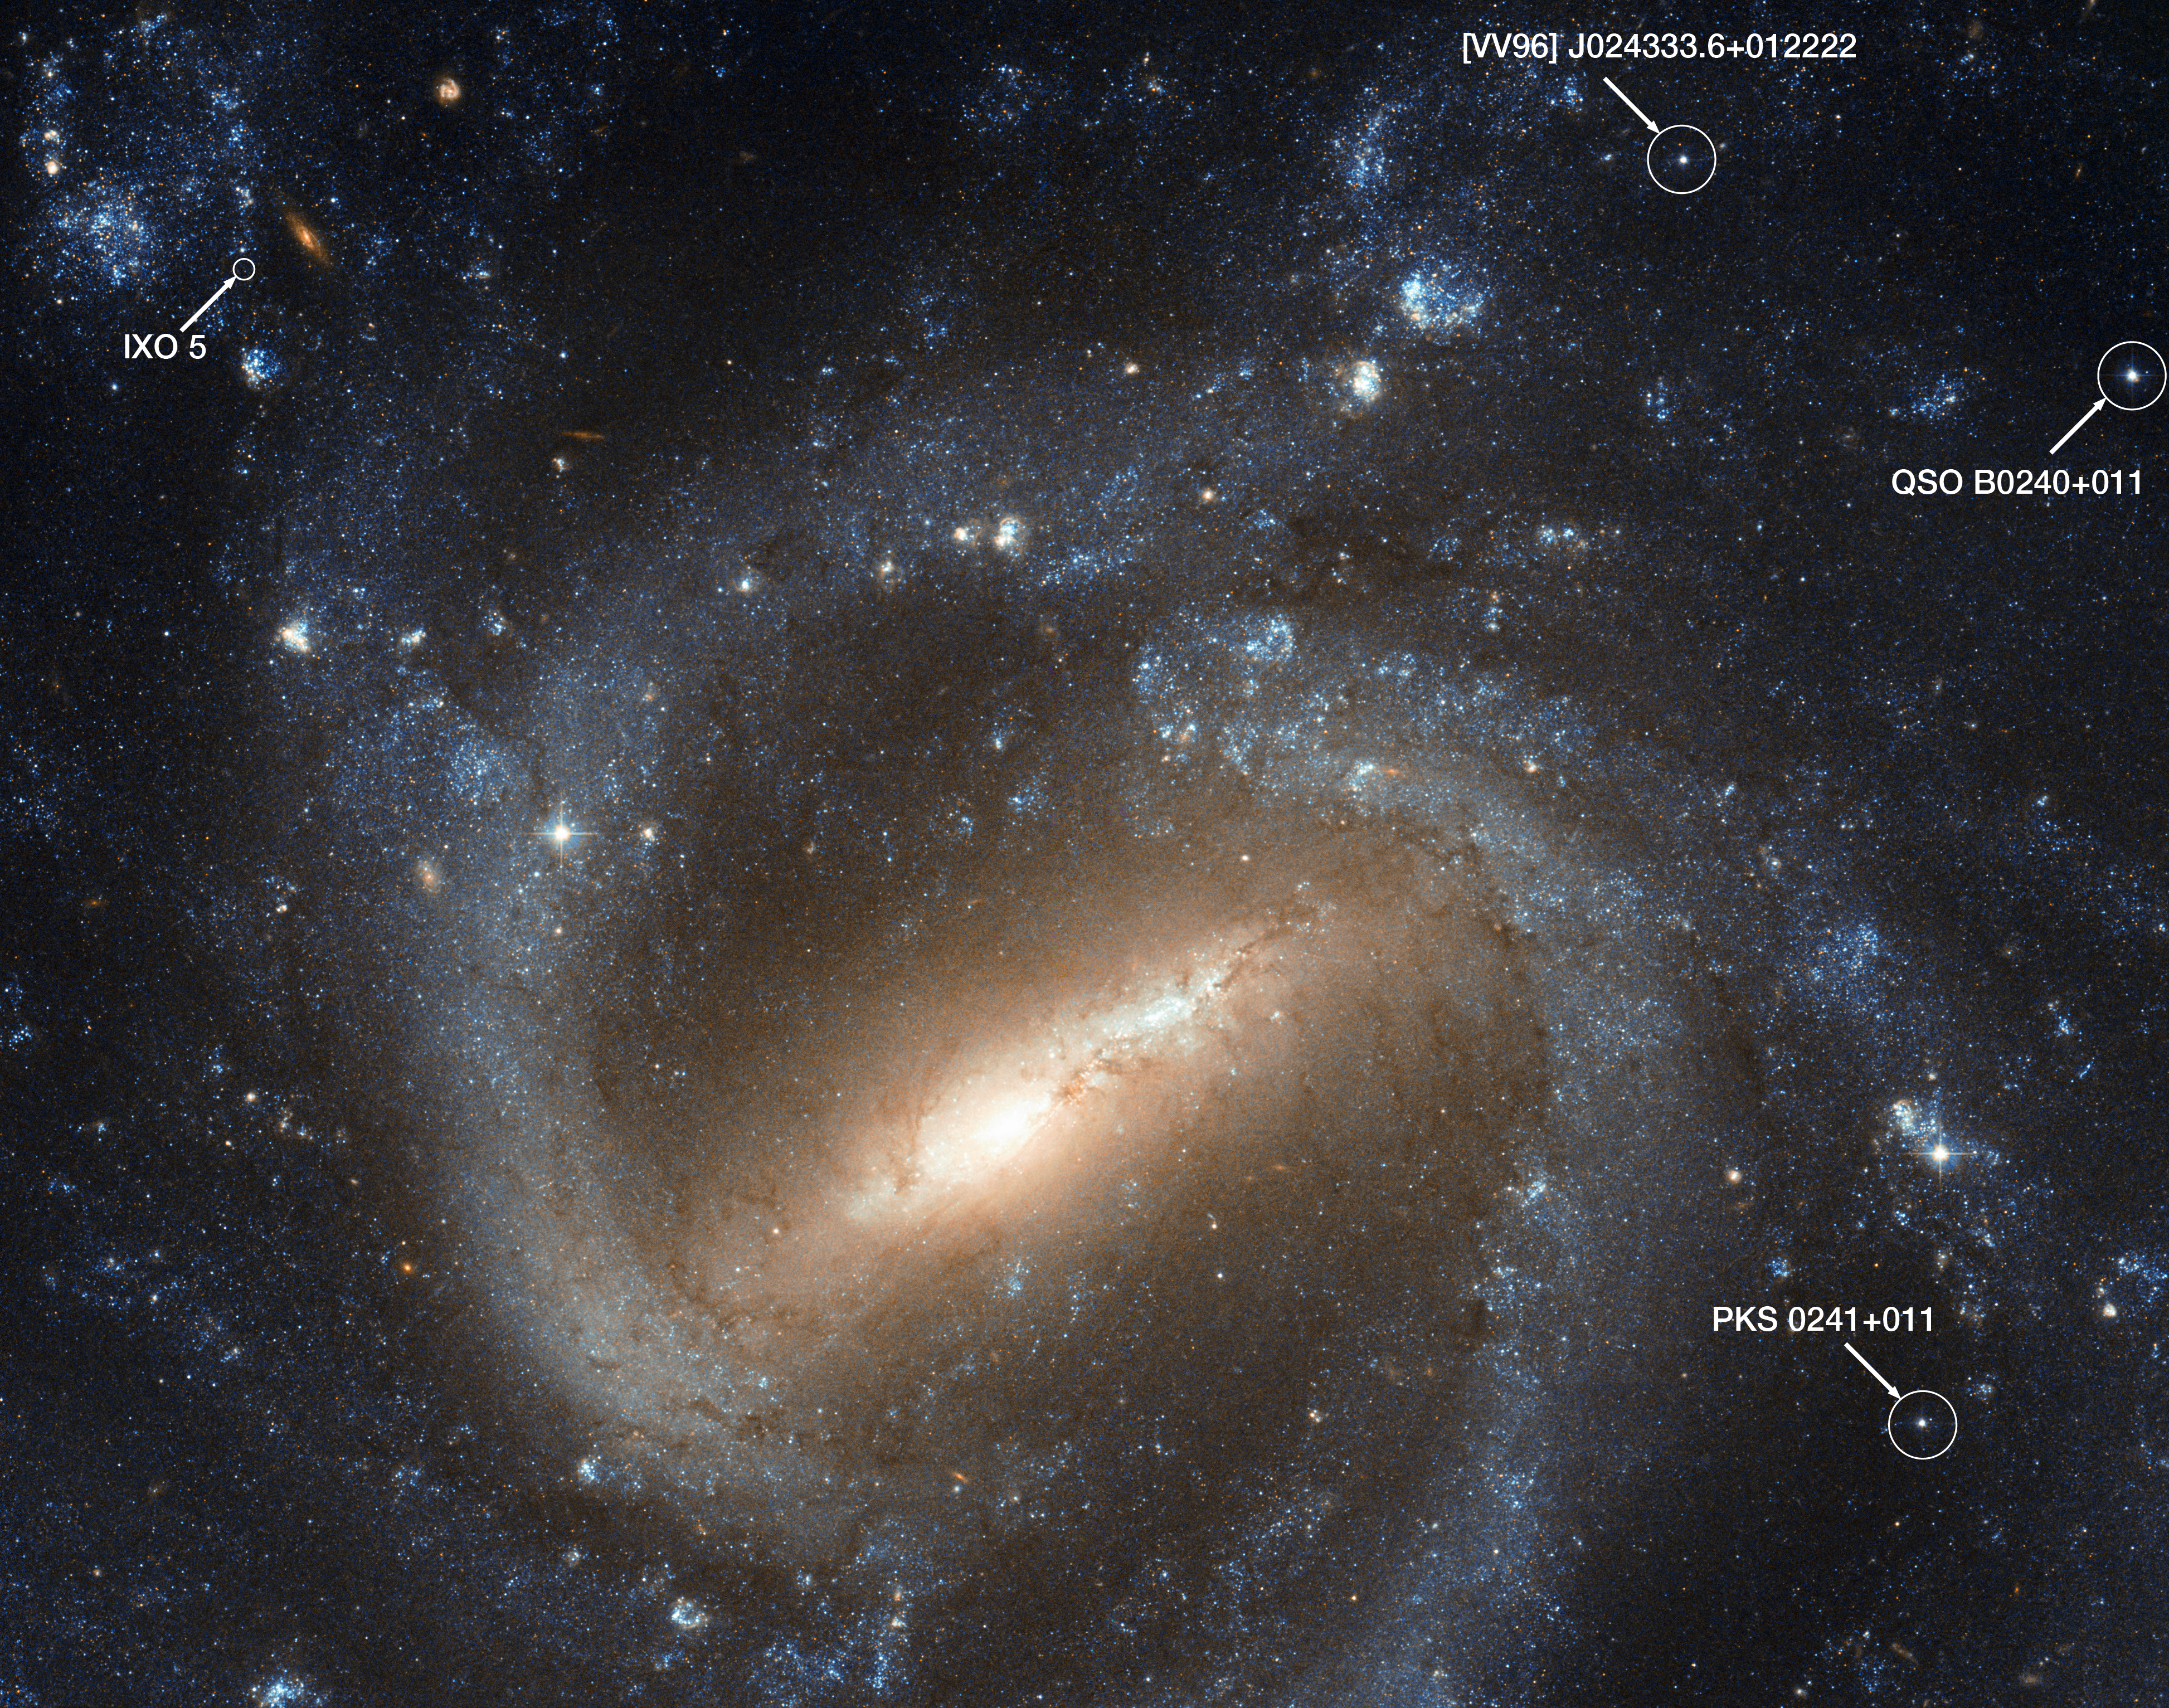

Labelled Hubble image of NGC 1073, showing quasars and IXO 5

The NASA/ESA Hubble Space Telescope has taken a picture of the barred spiral galaxy NGC 1073, which is found in the constellation of Cetus (The Sea Monster). The three star-like objects labelled here, PKS 0241+011, QSO B0240+011 and [VV96] J024333.6+012222, are actually not part of the galaxy. They are not even stars.

They are quasars, incredibly bright sources of light caused by matter heating up and falling into supermassive black holes in galaxies literally billions of light-years from us. From our distant perspective, they look like faint stars, but they are in fact some of the brightest objects in the Universe.

Another object in this field which has been studied by astronomers is a source of X-rays catalogued as IXO 5. X-ray sources are a tell-tale sign of high-energy phenomena. In this case, it is likely to be a binary system featuring a star and a black hole. As X-ray telescopes have less resolution than Hubble does, pinpointing the specific star in Hubble’s image that corresponds to the X-ray emissions is tough. In this case, it could be either one of two faint stars at the centre of the circle.

Credit: NASA & ESA